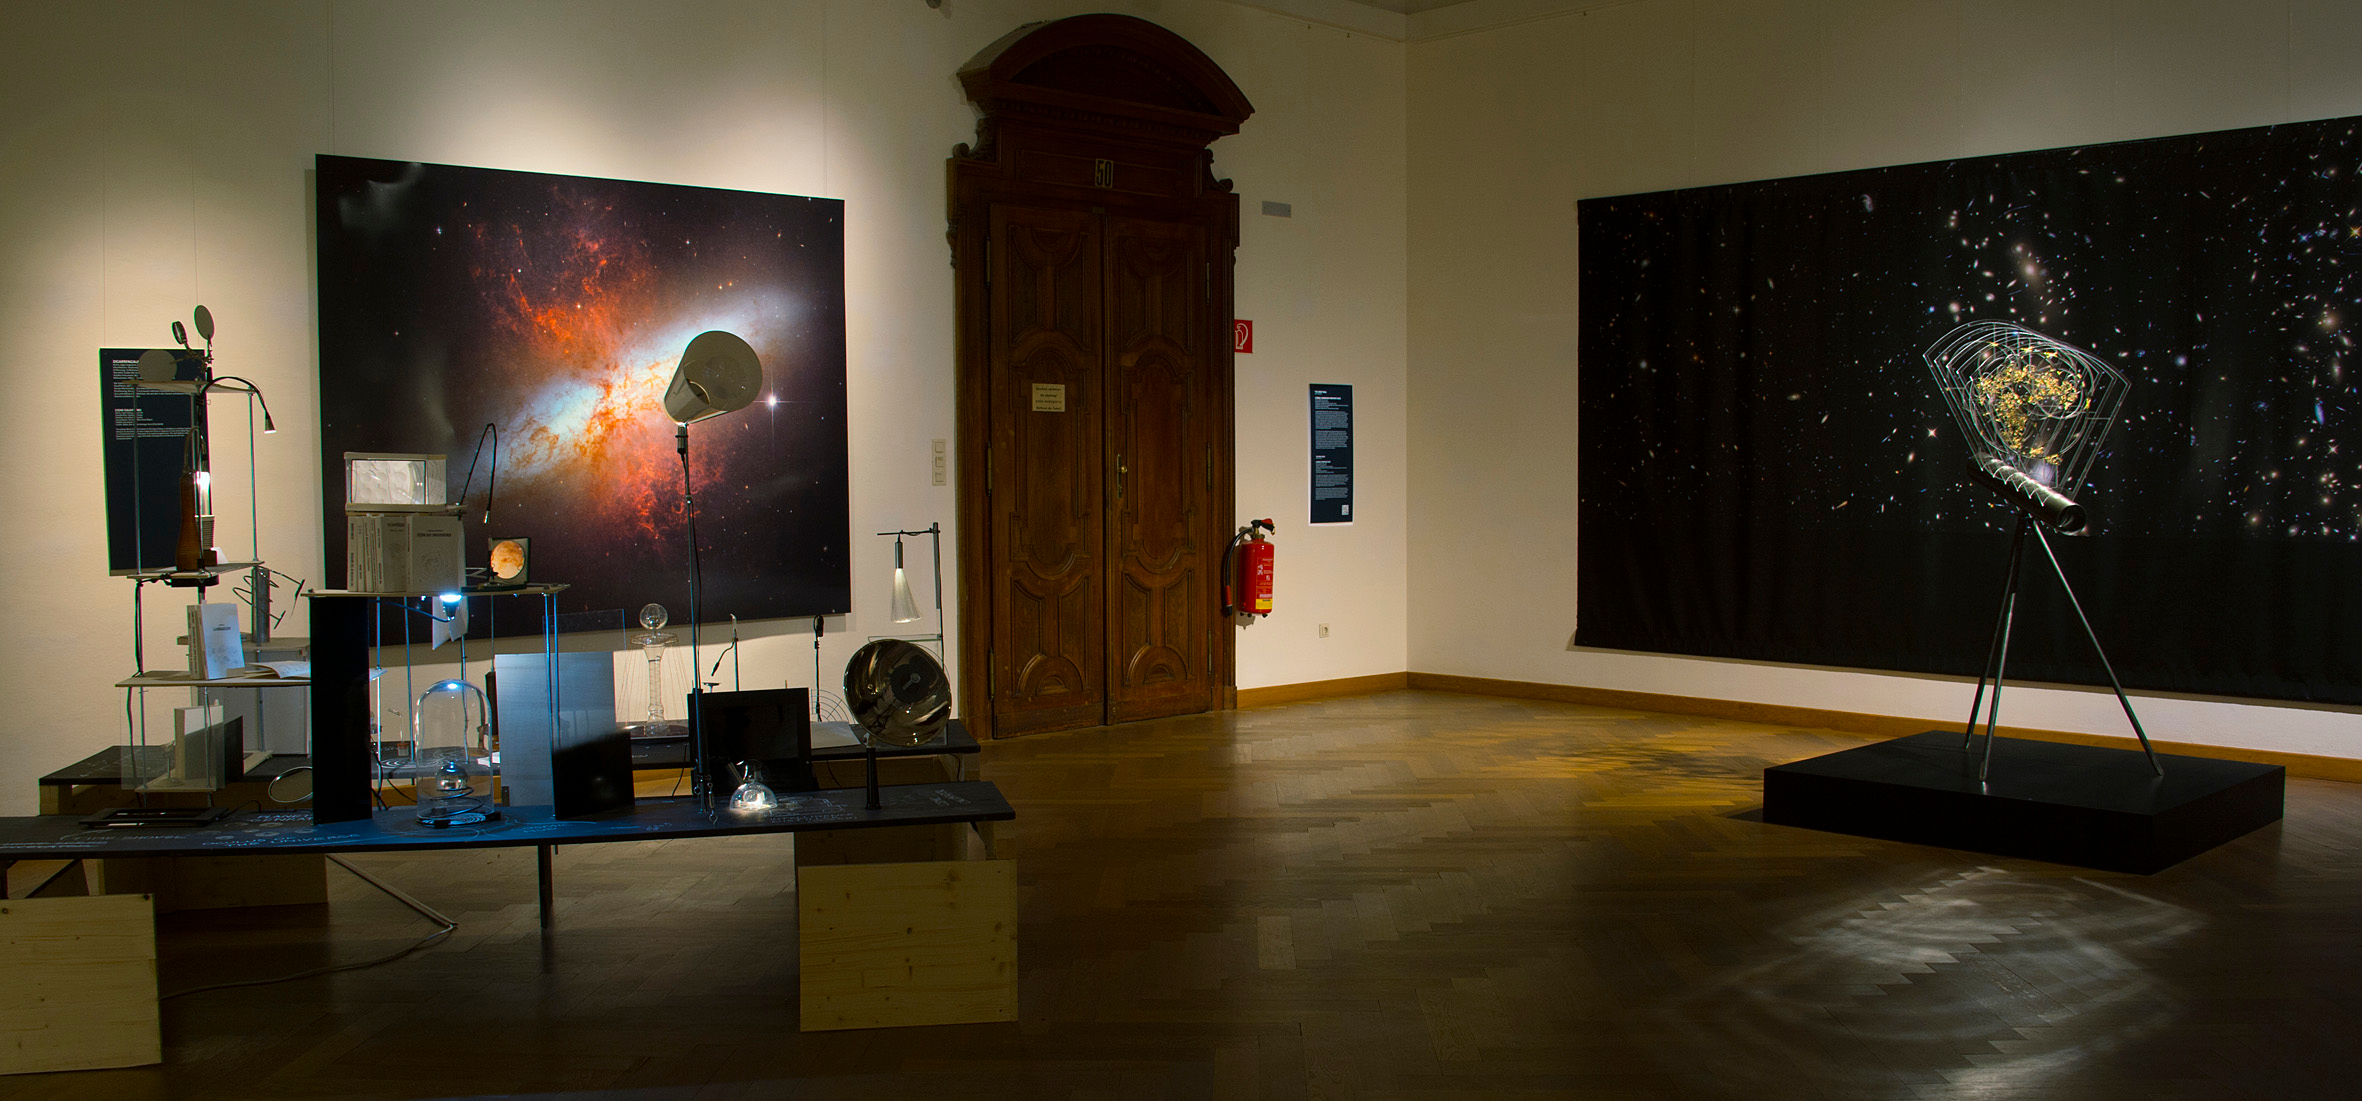

Our Place in Space in Vienna

The travelling exhibition Our Place in Space creates a connection between the images taken with the NASA/ESA Hubble Space Telescope and contemporary art. In Vienna both established artists and students from the University of Applied Arts got a chance to create their impression on Our Place in Space.

Credit: NHM Wien, Kurt Kracher